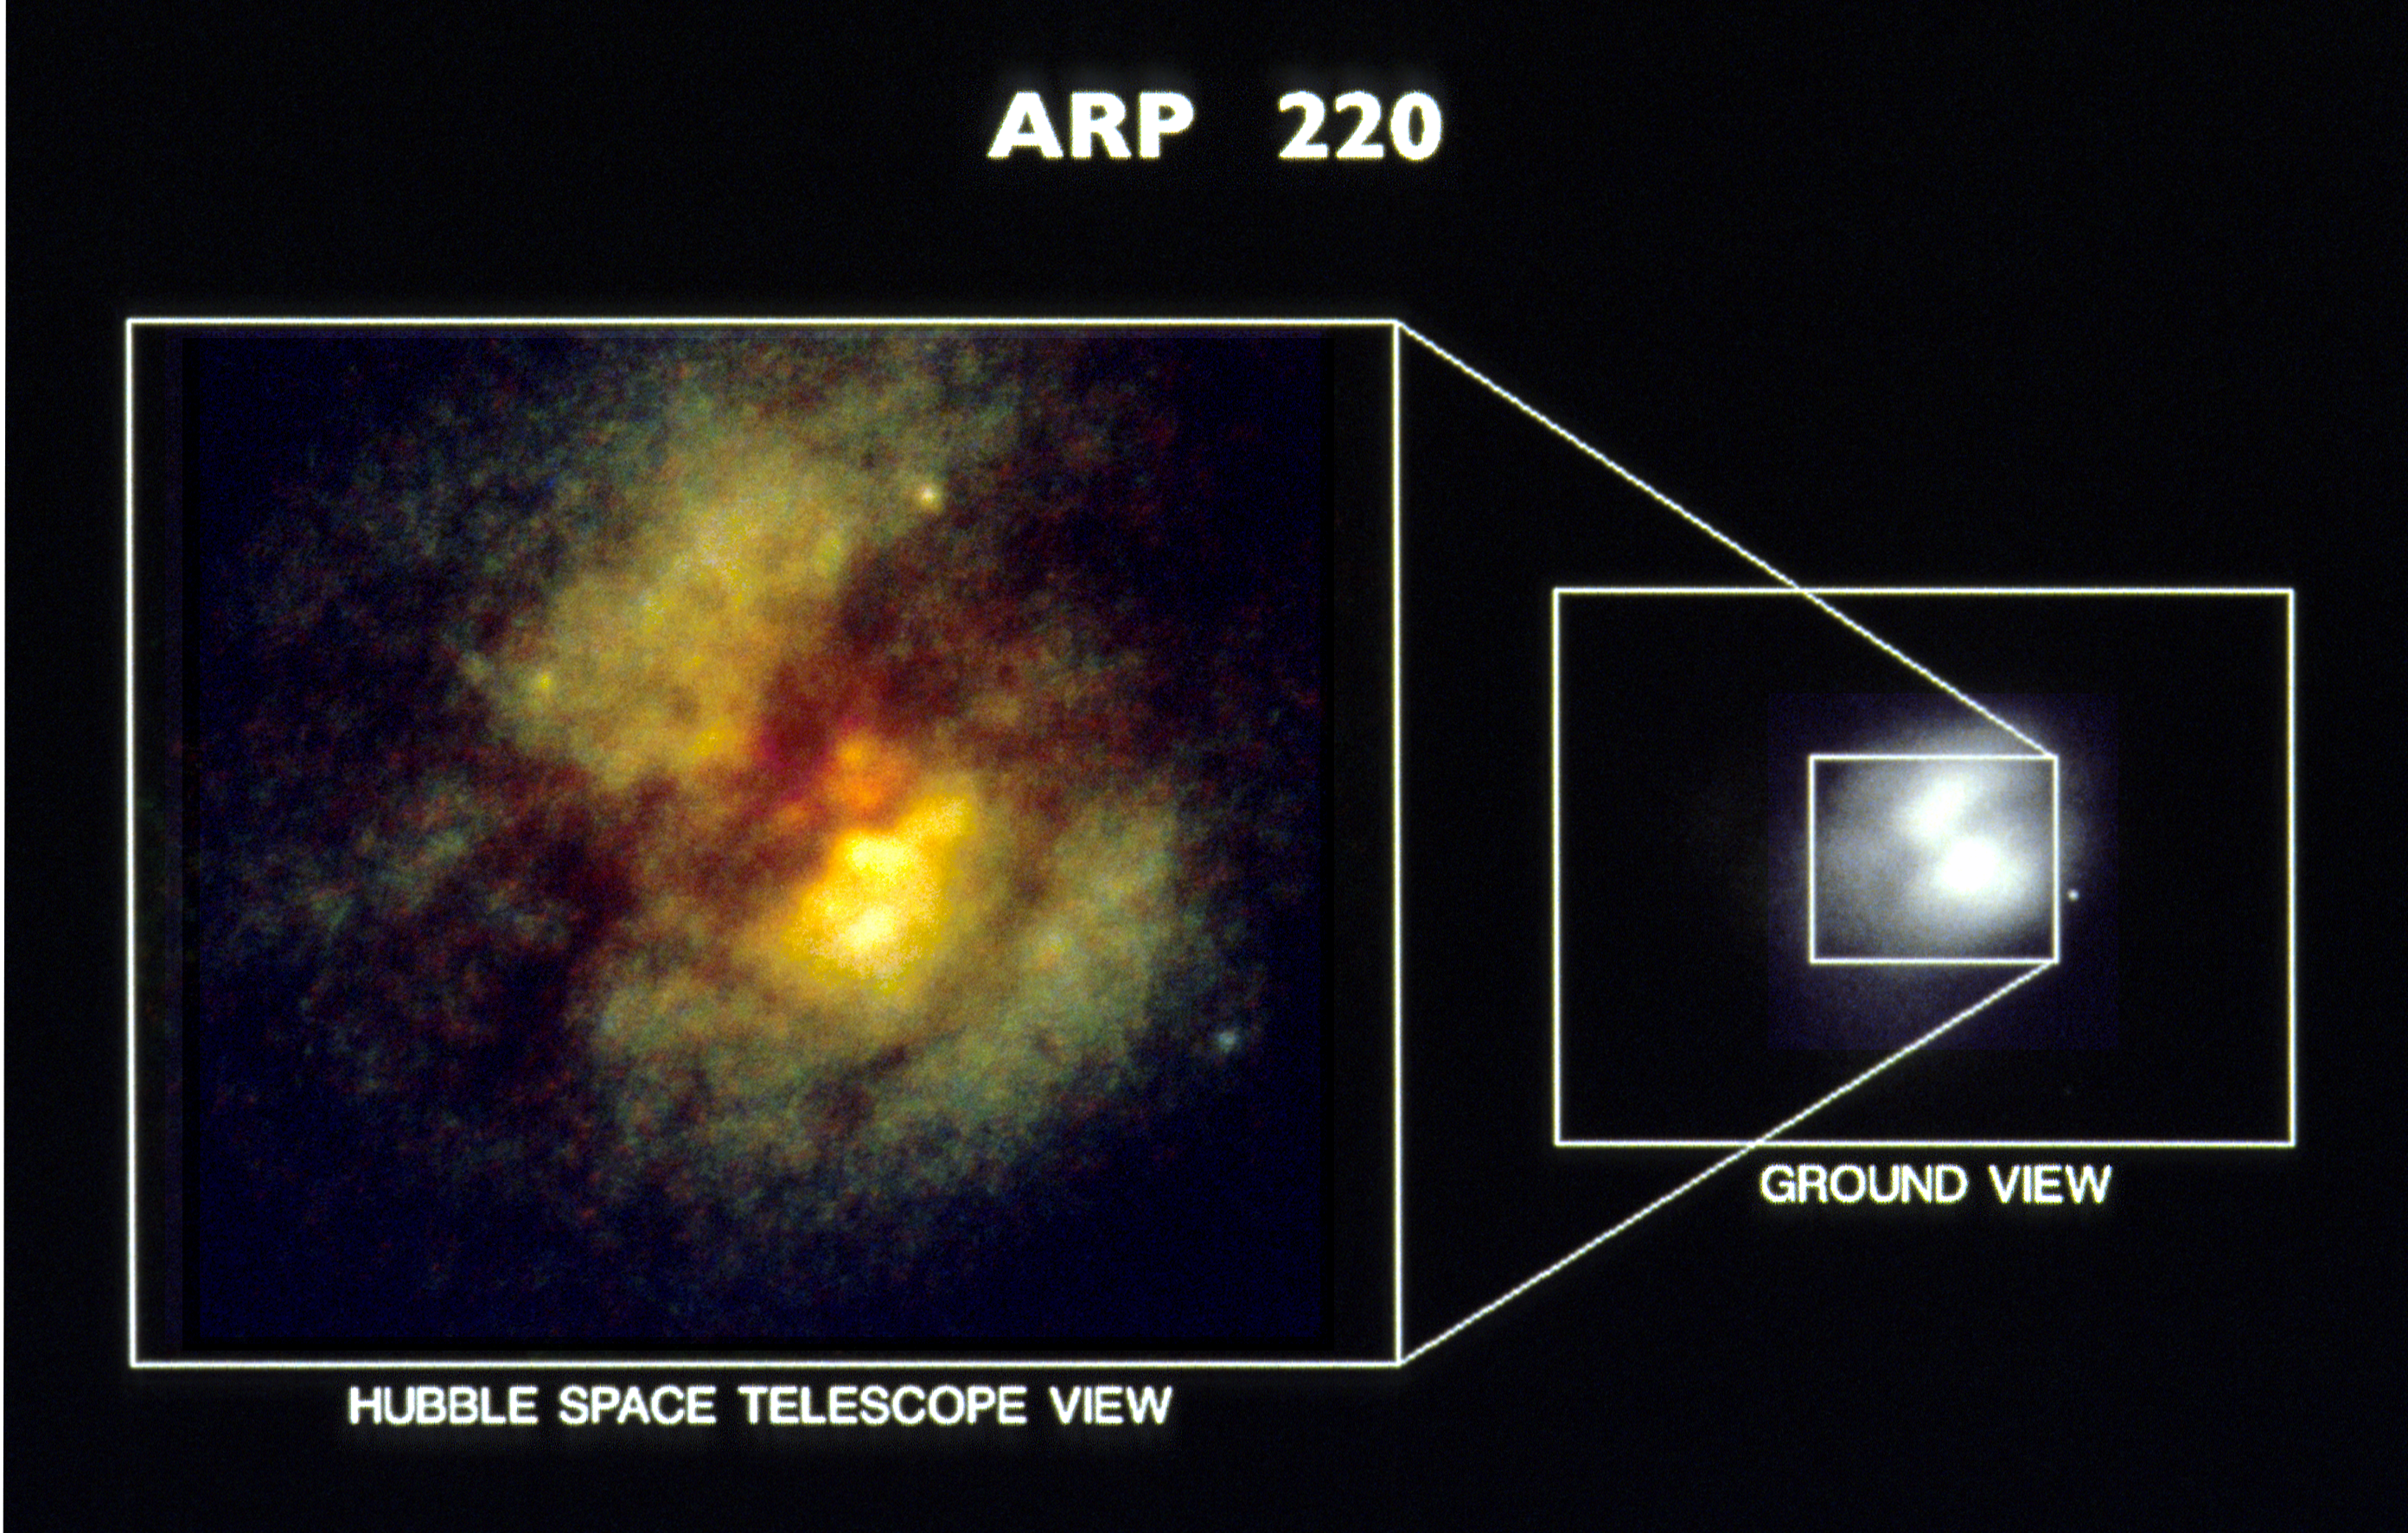

HST planetary camera images of core of peculiar galaxy Arp 220 (ground-based image vs. HST)

[right]
A ground-based telescopic photograph of the peculiar galaxy Arp 220 (image taken by K. Borne, H. Levison, and R. Lucas at USNO Flagstaff Station, Arizona) shows a curious double-lobed structure. This structure was first interpreted as two galaxies merging together, until subsequent observations with highly sensitive CCD detectors revealed a dust lane down the center which made the galaxy appear double lobed.

[left]
A "true-color" image of the central pan of the Arp 220 taken with the WFPC on the Hubble Space Telescope. HST reveals a new complex structure within one arc second of the nucleus. HST reveals a new class of object at the core: gigantic young star clusters which are ten times larger than clusters previously observed. They were probably produced by the collision of two spiral galaxies. Stars are produced at a furious rate from the raw dust and gas supplied by the collision.

Credit: E. Shaya, D. Dowling/U. of Maryland, the WFPC Team, and NASA/ESA